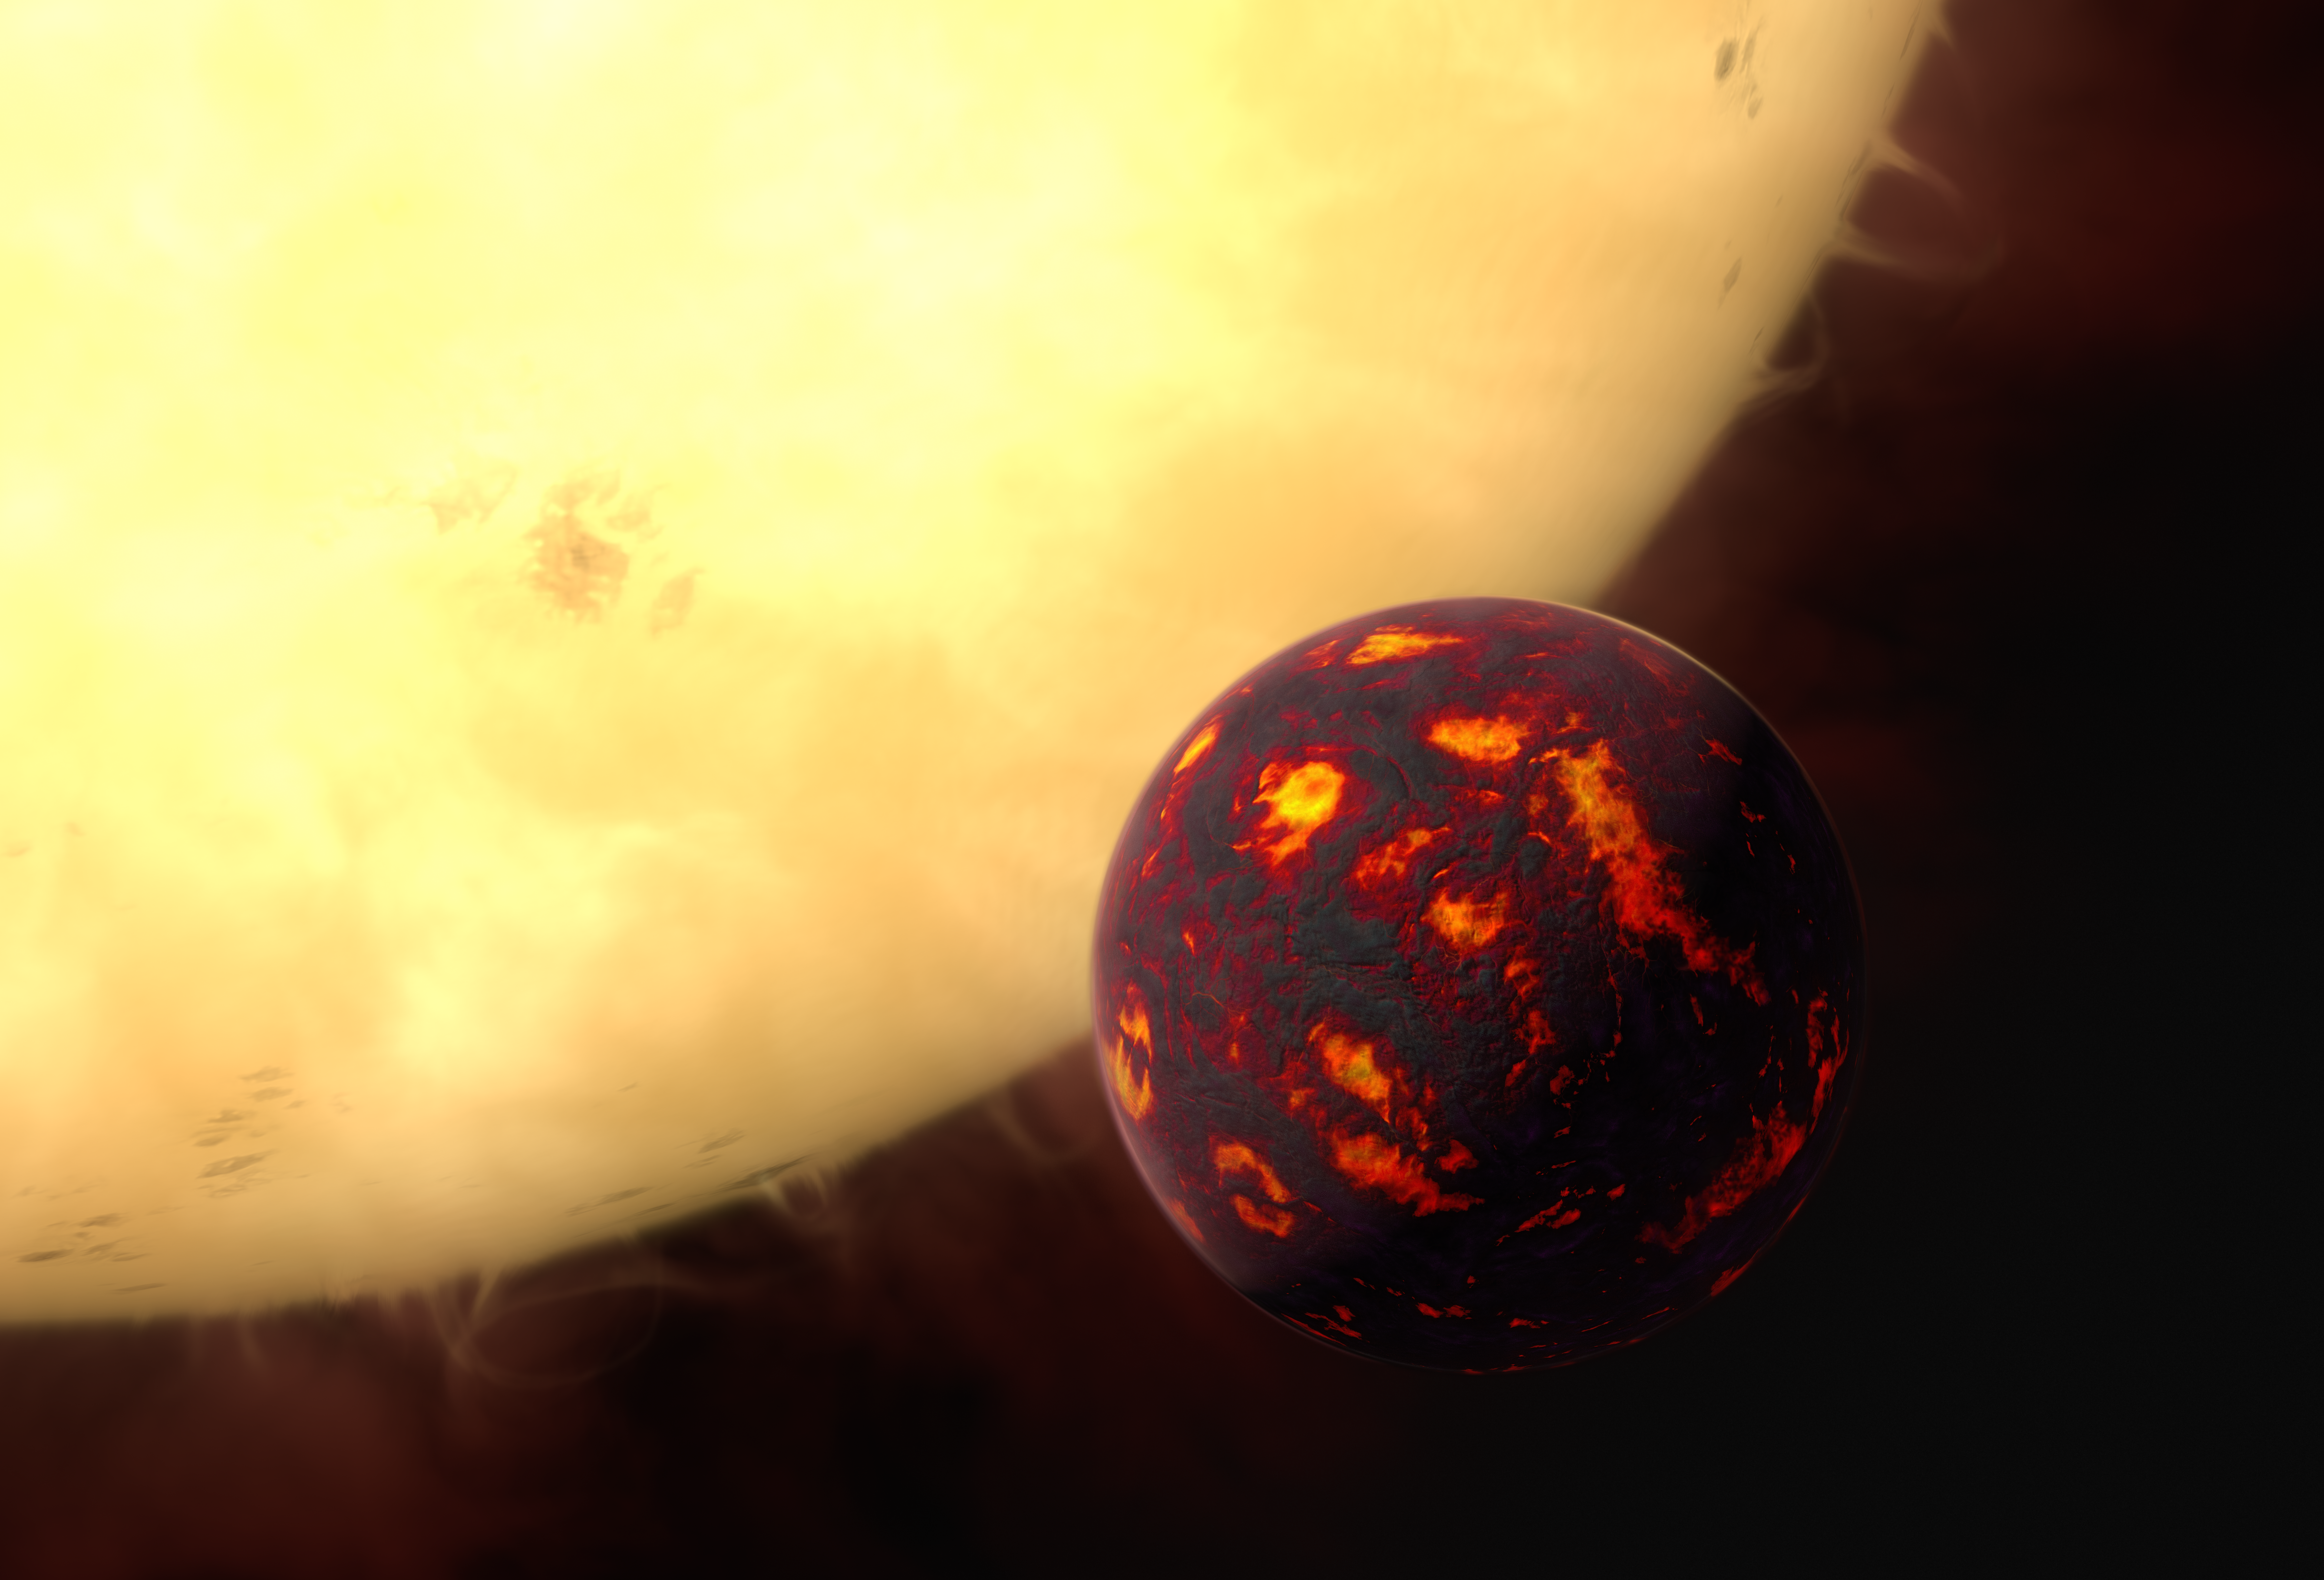

Artist’s impression of 55 Cancri e

This artist’s impression shows the super-Earth 55 Cancri e in front of its parent star. Using observations made with the NASA/ESA Hubble Space Telescope and new analytic software scientists were able to analyse the composition of its atmosphere. It was the first time this was possible for a super-Earth.

55 Cancri e is about 40 light-years away and orbits a star slightly smaller, cooler and less bright than our Sun. As the planet is so close to its parent star, one year lasts only 18 hours and temperatures on the surface are thought to reach around 2000 degrees Celsius.

Credit: ESA/Hubble, M. Kornmesser